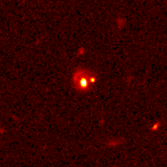

Hubble pinpoints distant supernovae

These Hubble Space Telescope images pinpoint three distant supernovae, which exploded and died billions of years ago. Scientists are using these faraway light sources to estimate if the universe was expanding at a faster rate long ago and is now slowing down.

Credit: Peter Garnavich, Harvard-Smithsonian Center for Astrophysics, the High-z Supernova Search Team, and NASA/ESA